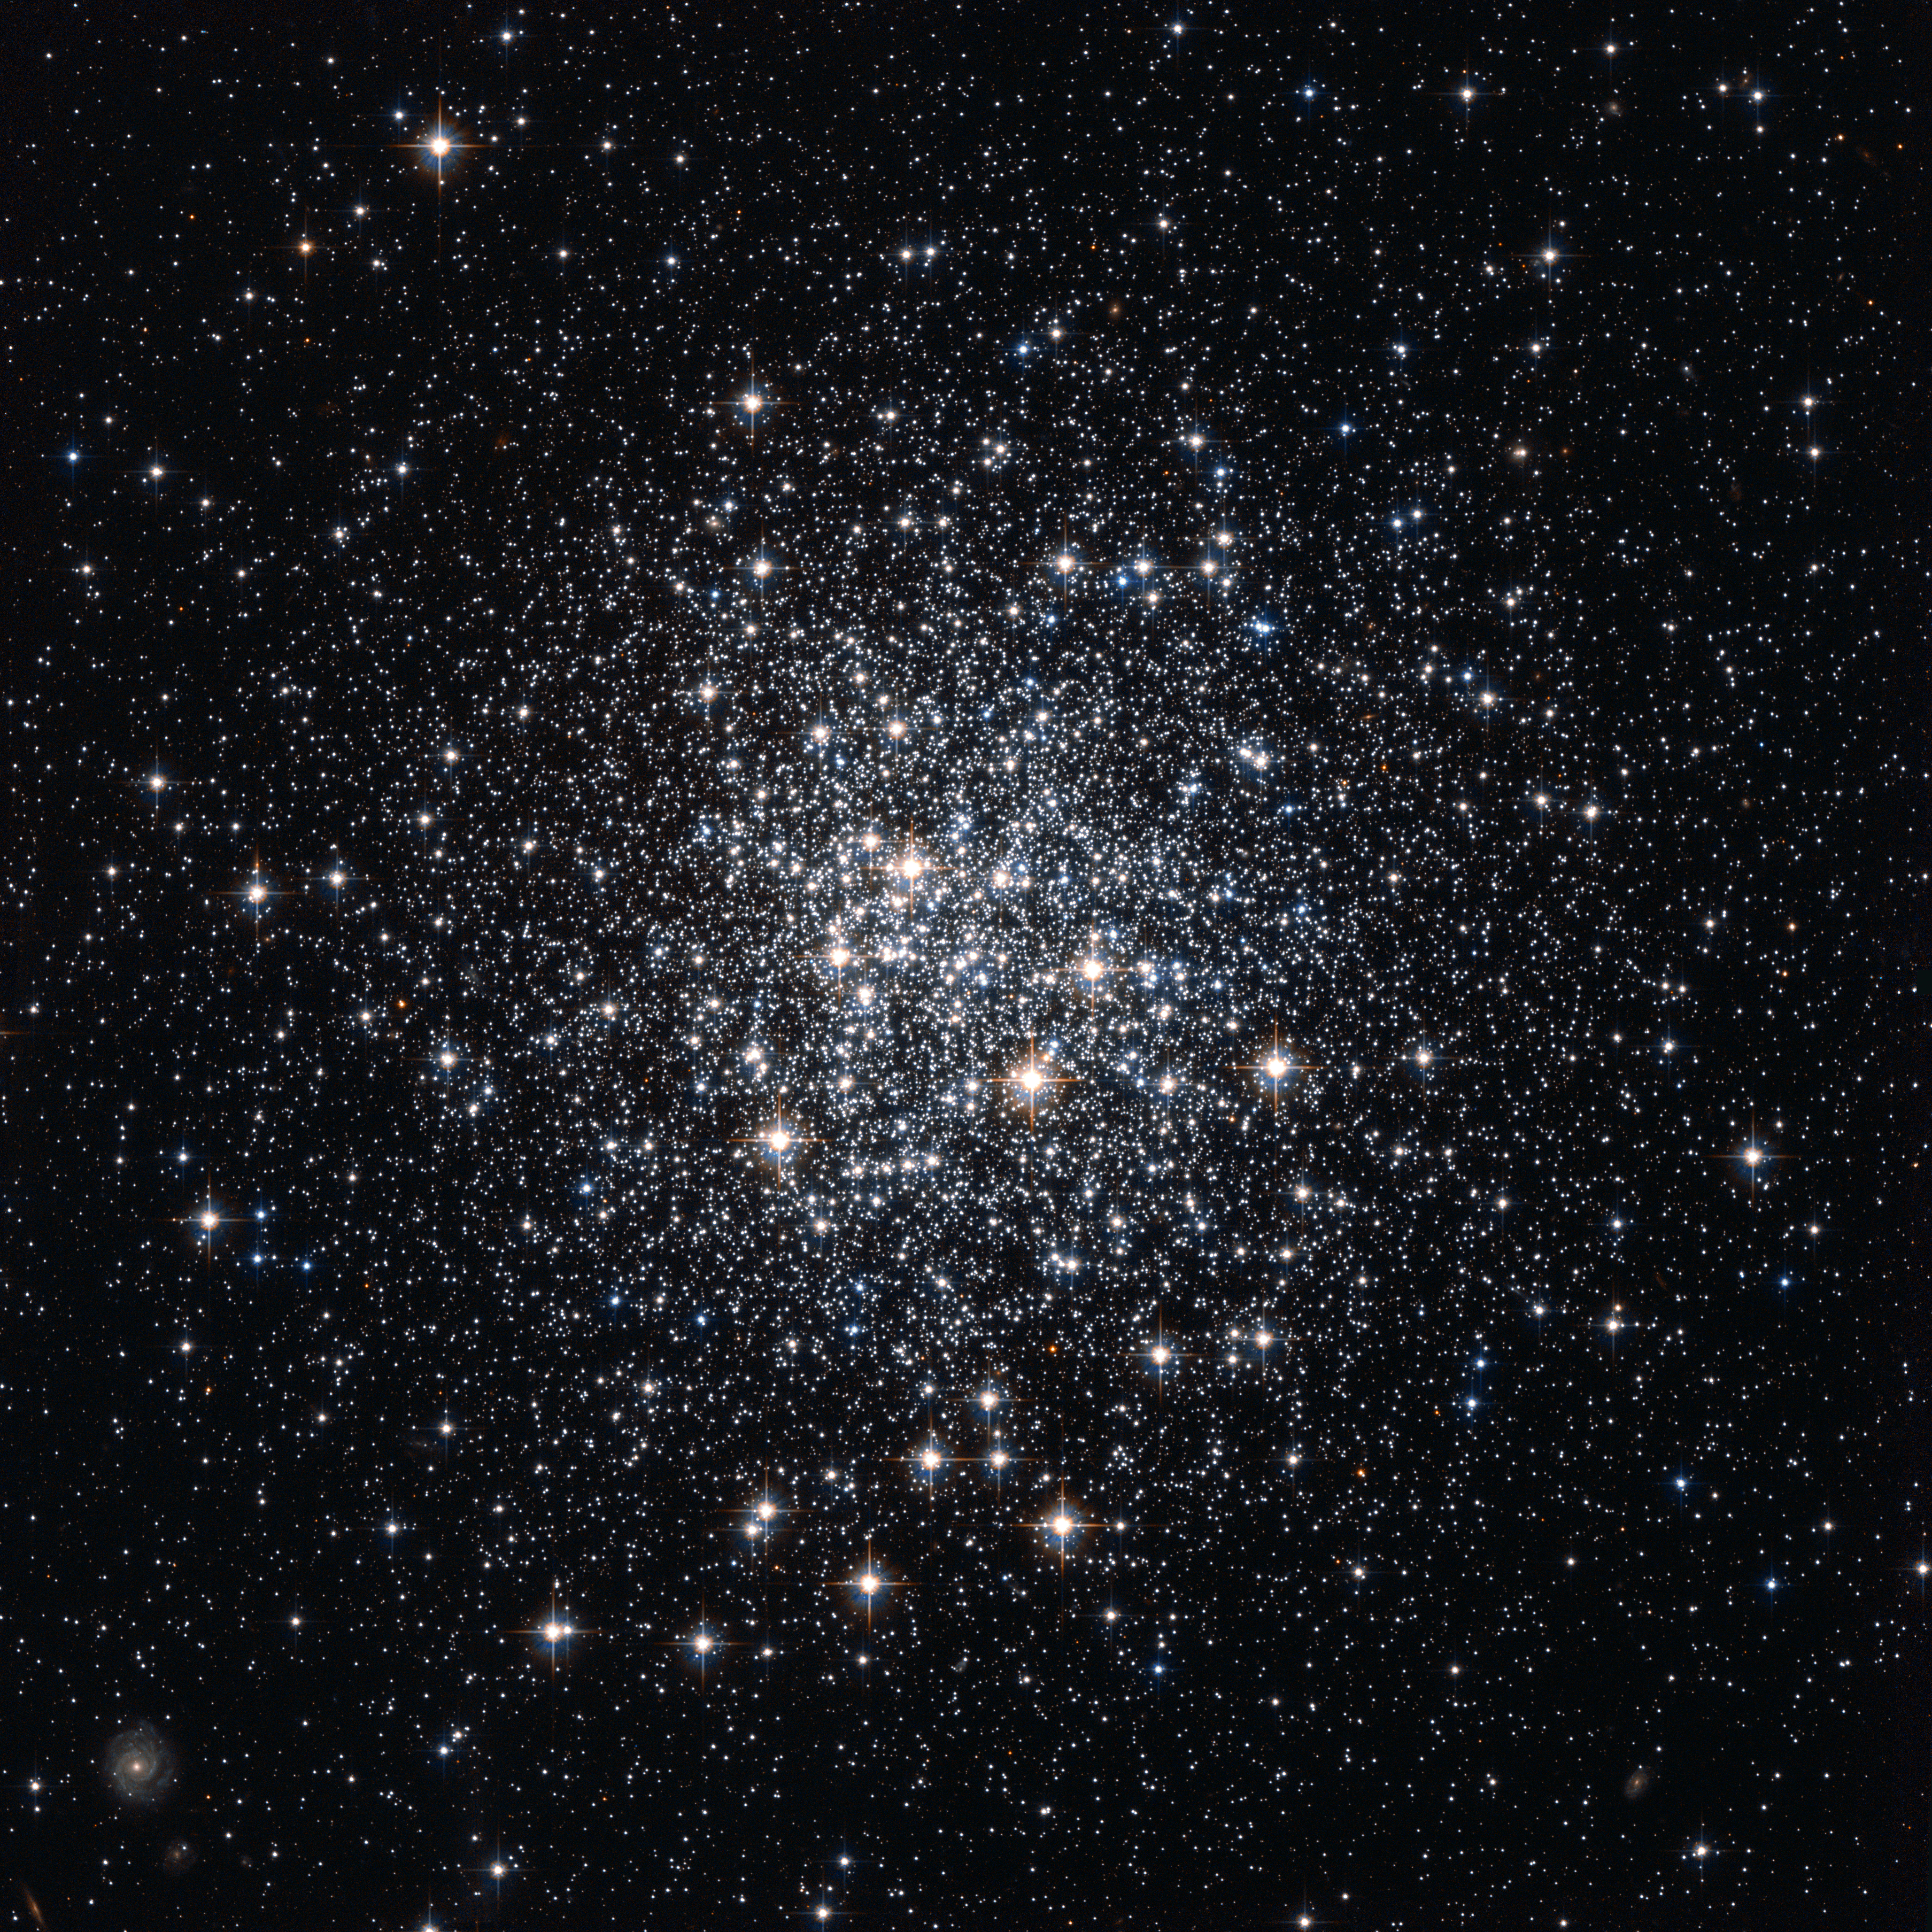

Messier 72, a celestial city from above

As the first in the new weekly series of spectacular images from the NASA/ESA Hubble Space Telescope, the Hubble Picture of the Week, ESA/Hubble presents a stunning image of an unfamiliar star cluster.

This rich collection of scattered stars, known as Messier 72, looks like a city seen from an airplane window at night, as small glints of light from suburban homes dot the outskirts of the bright city centre. Messier 72 is actually a globular cluster, an ancient spherical collection of old stars packed much closer together at its centre, like buildings in the heart of a city compared to less urban areas. As well as huge numbers of stars in the cluster itself the picture also captures the images of many much more distant galaxies seen between and around the cluster stars.

French astronomer Pierre Méchain discovered this rich cluster in August of 1780, but we take Messier 72’s most common name from Méchain’s colleague Charles Messier, who recorded it as the 72nd entry in his famous catalogue of comet-like objects just two months later. This globular cluster lies in the constellation of Aquarius (the Water Bearer) about 50 000 light-years from Earth.

This striking image was taken with the Wide Field Channel of the Advanced Camera for Surveys on the NASA/ESA Hubble Space Telescope. The image was created from pictures taken through yellow and near-infrared filters (F606W and F814W). The exposure times were about ten minutes per filter and the field of view is about 3.4 arcminutes across.

Credit: ESA/Hubble & NASA